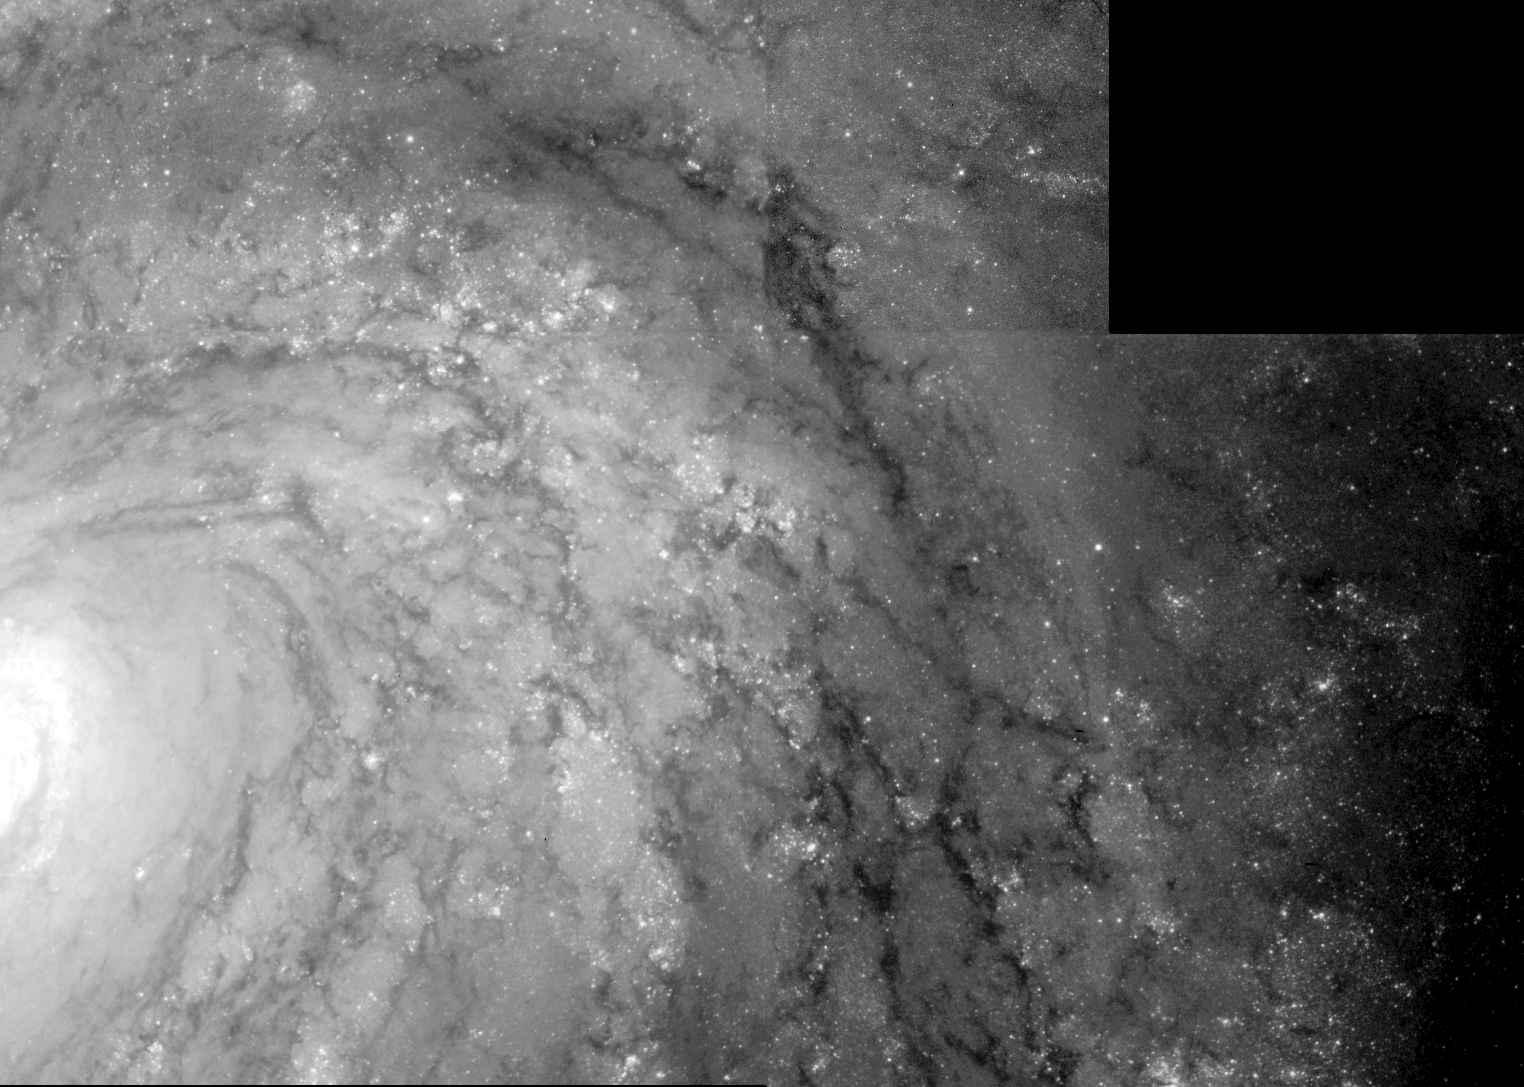

Cepheid Variable Star in Galaxy M100

This NASA/ESA Hubble Space Telescope image of a region of the galaxy M100 shows a class of pulsating star called a Cepheid Variable. Though rare, these stars are reliable distance indicators to galaxies. Based on the Hubble observation, the distance to M100 has been measured accurately as 56 million light-years (+/- 6 million light-years), making it the farthest object where intergalactic distances have been determined precisely.

Credit: Dr. Wendy L. Freedman, Observatories of the Carnegie Institution of Washington, and NASA/ESA